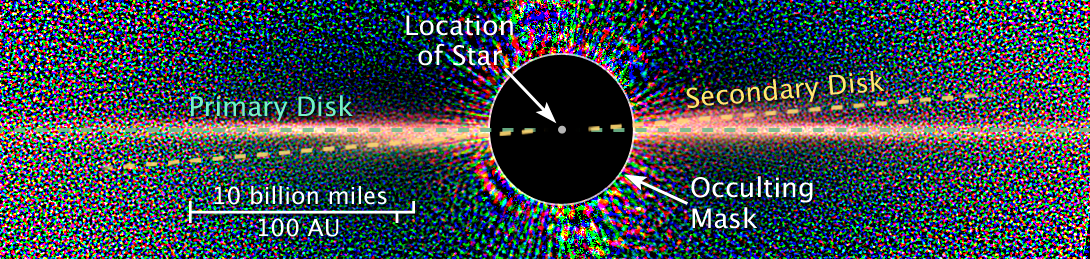

Beta Pictoris - Star with Disk - Annotated

Detailed images of the nearby star Beta Pictoris, taken by NASA/ESA Hubble Space Telescope, confirm the existence of not one but two dust disks encircling the star. The images offer tantalizing new evidence for at least one Jupiter-size planet orbiting Beta Pictoris.

The finding ends a decade of scientific speculation that an odd warp in the young star's debris disk may actually be another inclined disk. The recent Hubble Advanced Camera for Surveys view - the best visible-light image of Beta Pictoris - clearly shows a distinct secondary disk that is tilted by about 4 degrees from the main disk. The secondary disk is visible out to roughly 24 billion miles (almost 40 billion kilometres) from the star, and probably extends even farther, said astronomers. This Hubble image of Beta Pictoris clearly shows a primary dust disk and a much fainter secondary dust disk. Astronomers used the Advanced Camera's coronagraph to block out the light from the bright star.

Credit: NASA, ESA, D. Golimowski (Johns Hopkins University), D. Ardila (IPAC), J. Krist (JPL), M. Clampin (GSFC), H. Ford (JHU), and G. Illingworth (UCO/Lick) and the ACS Science Team